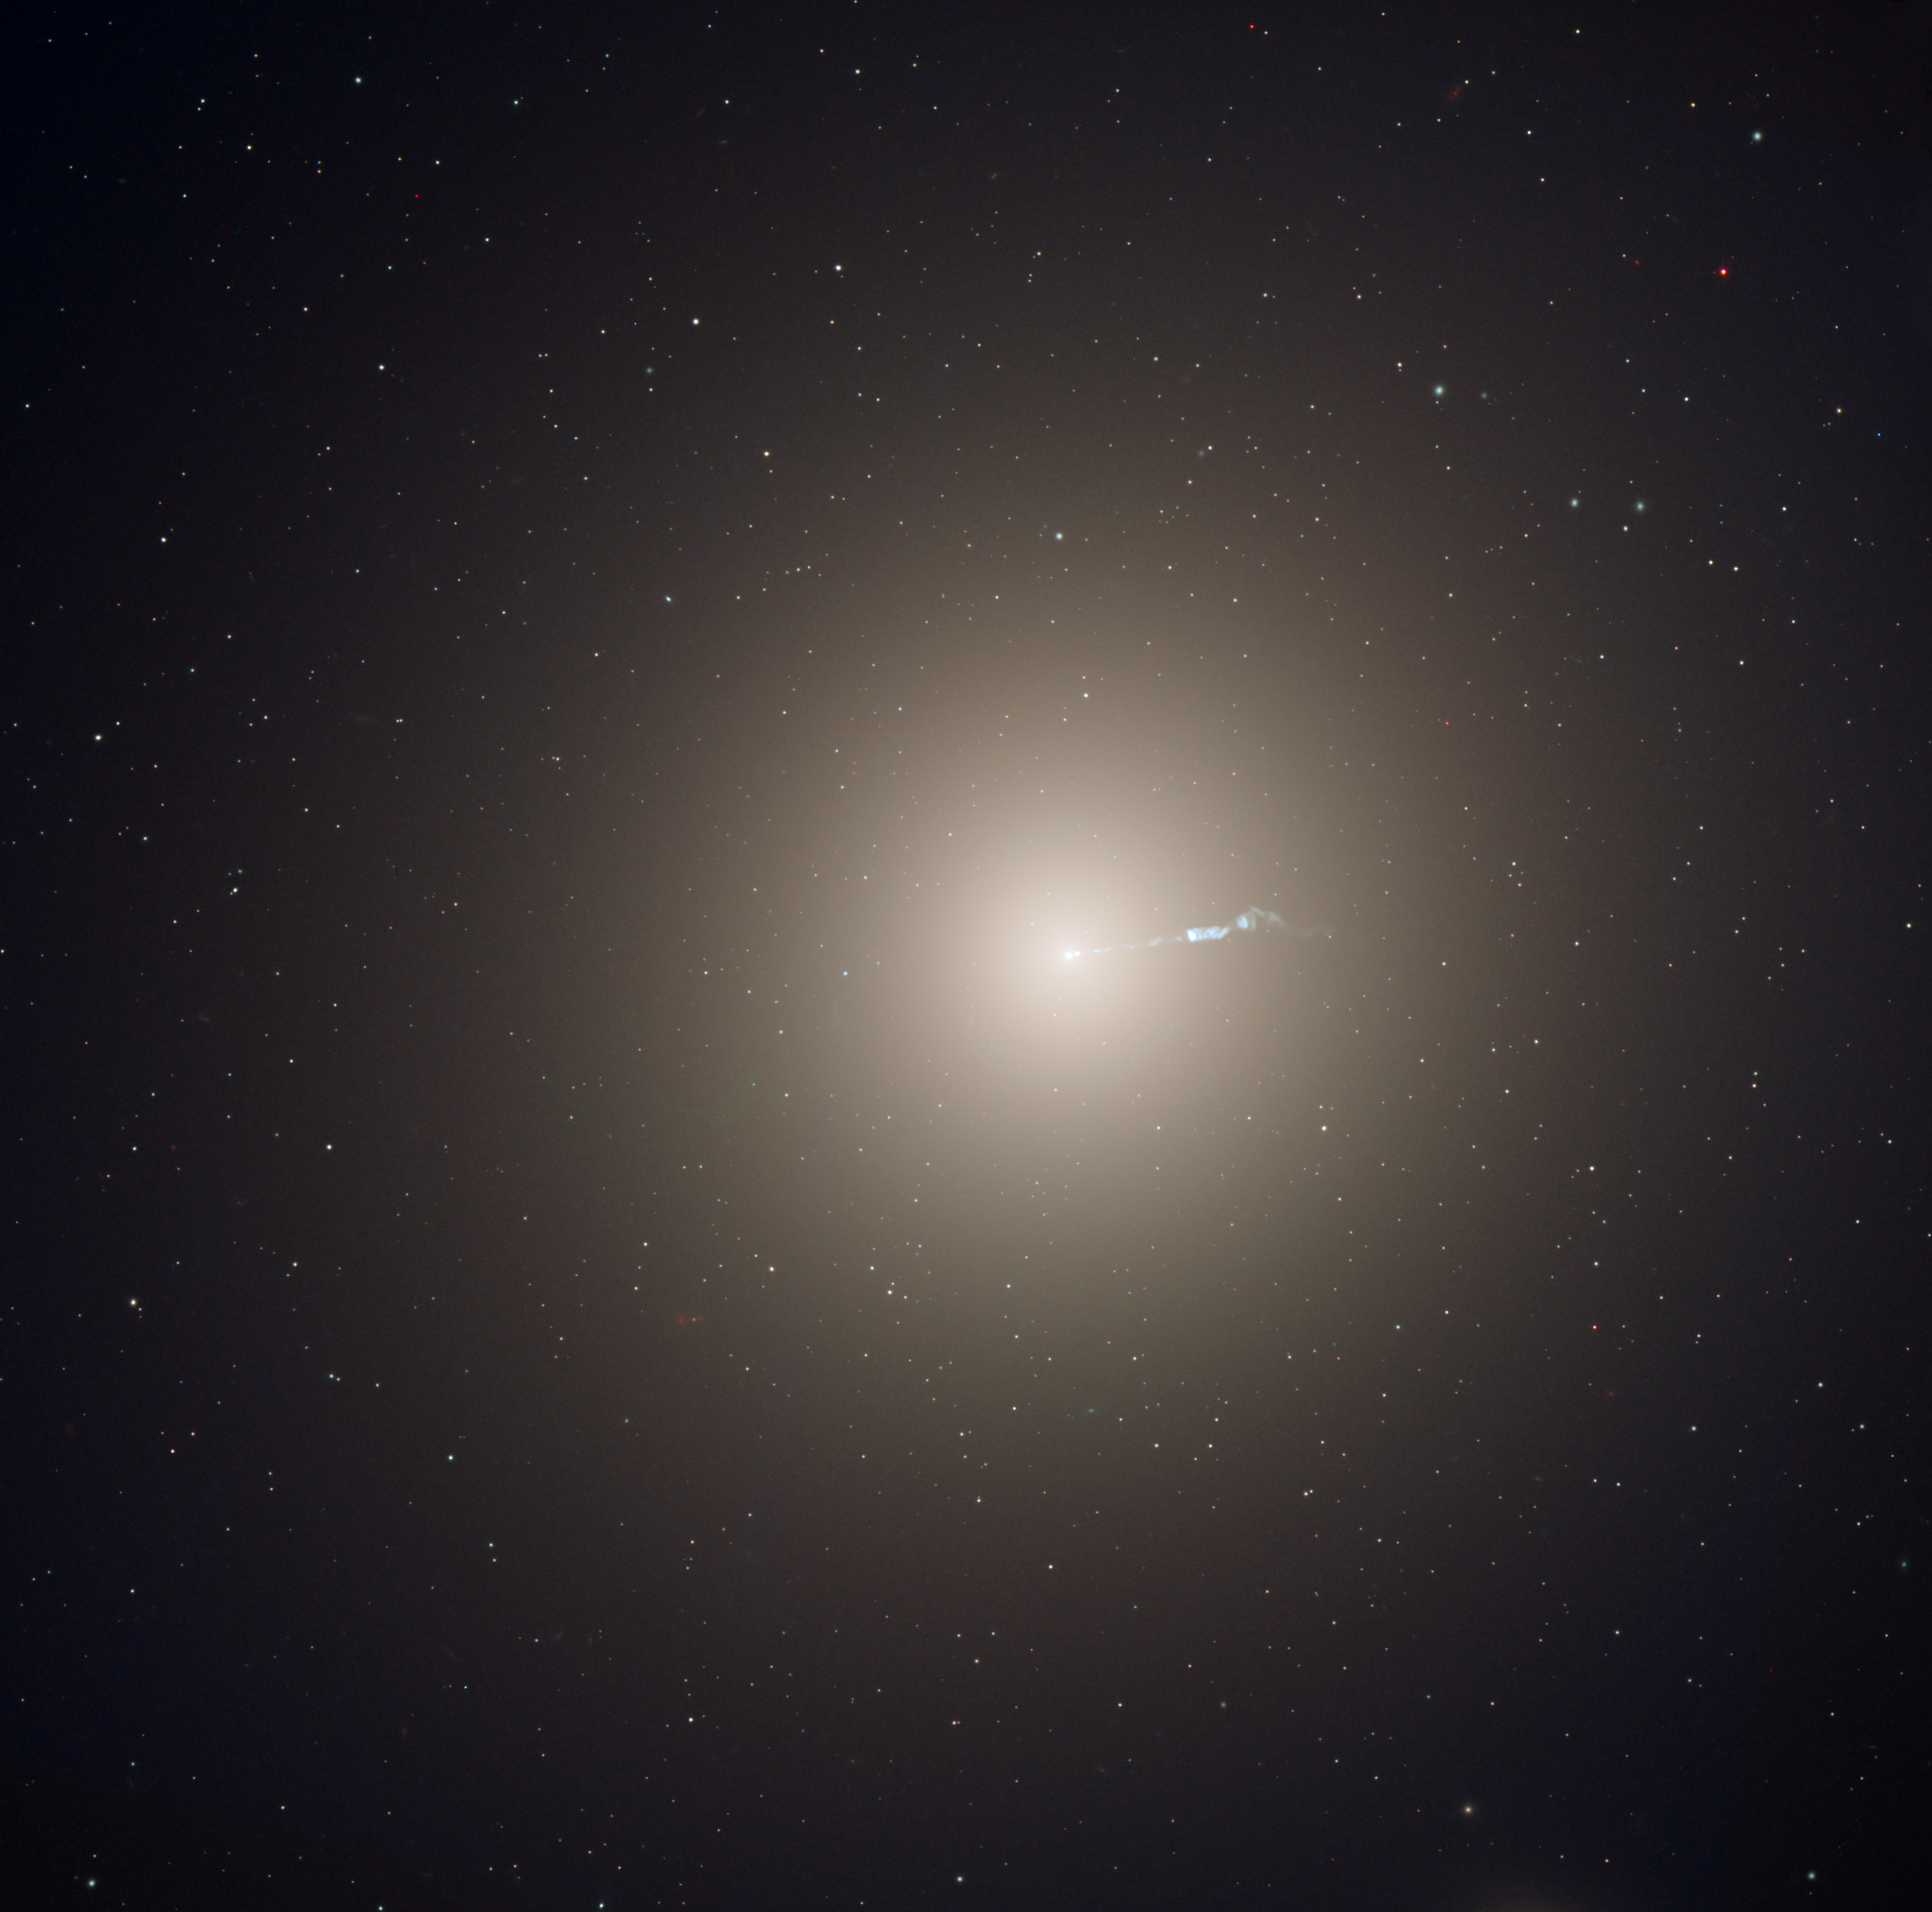

Lord of the stars

The monstrous elliptical galaxy M87 is the home of several trillion stars, a supermassive black hole, and family of 13,000 globular star clusters.

M87 is the dominant galaxy at the centre of the neighbouring Virgo Cluster of galaxies, which contains some 2,000 galaxies.

Amid the smooth yellow population of older stars, the two features that stand out most in this Hubble Space Telescope image of M87 are its soft blue jet and the myriad of starlike globular clusters scattered throughout the image.

The jet is a black-hole-powered stream of material that is being ejected from the core of the galaxy.

As gaseous material from the centre of the galaxy accretes onto the black hole, the resultant energy released produces a fire-hose stream of subatomic particles that are accelerated to velocities near the speed of light.

Being in the centre of the Virgo Cluster of galaxies, M87 may have accumulated some of its globular clusters by gravitationally pulling them from nearby dwarf galaxies that seem to be devoid of globulars today.

The 120,000-light-year-diameter galaxy lies at a distance of 54 million light-years from the Sun in the spring constellation Virgo.

This image was made from data taken in 2003 and 2006 with Hubble's Advanced Camera for Surveys. The image is a composite of individual filtered data that cover the visible and infrared portions of the spectrum.

Credit: NASA, ESA, and the Hubble Heritage Team (STScI/AURA) Acknowledgment: P. Cote (Herzberg Institute of Astrophysics) and E. Baltz (Stanford University)